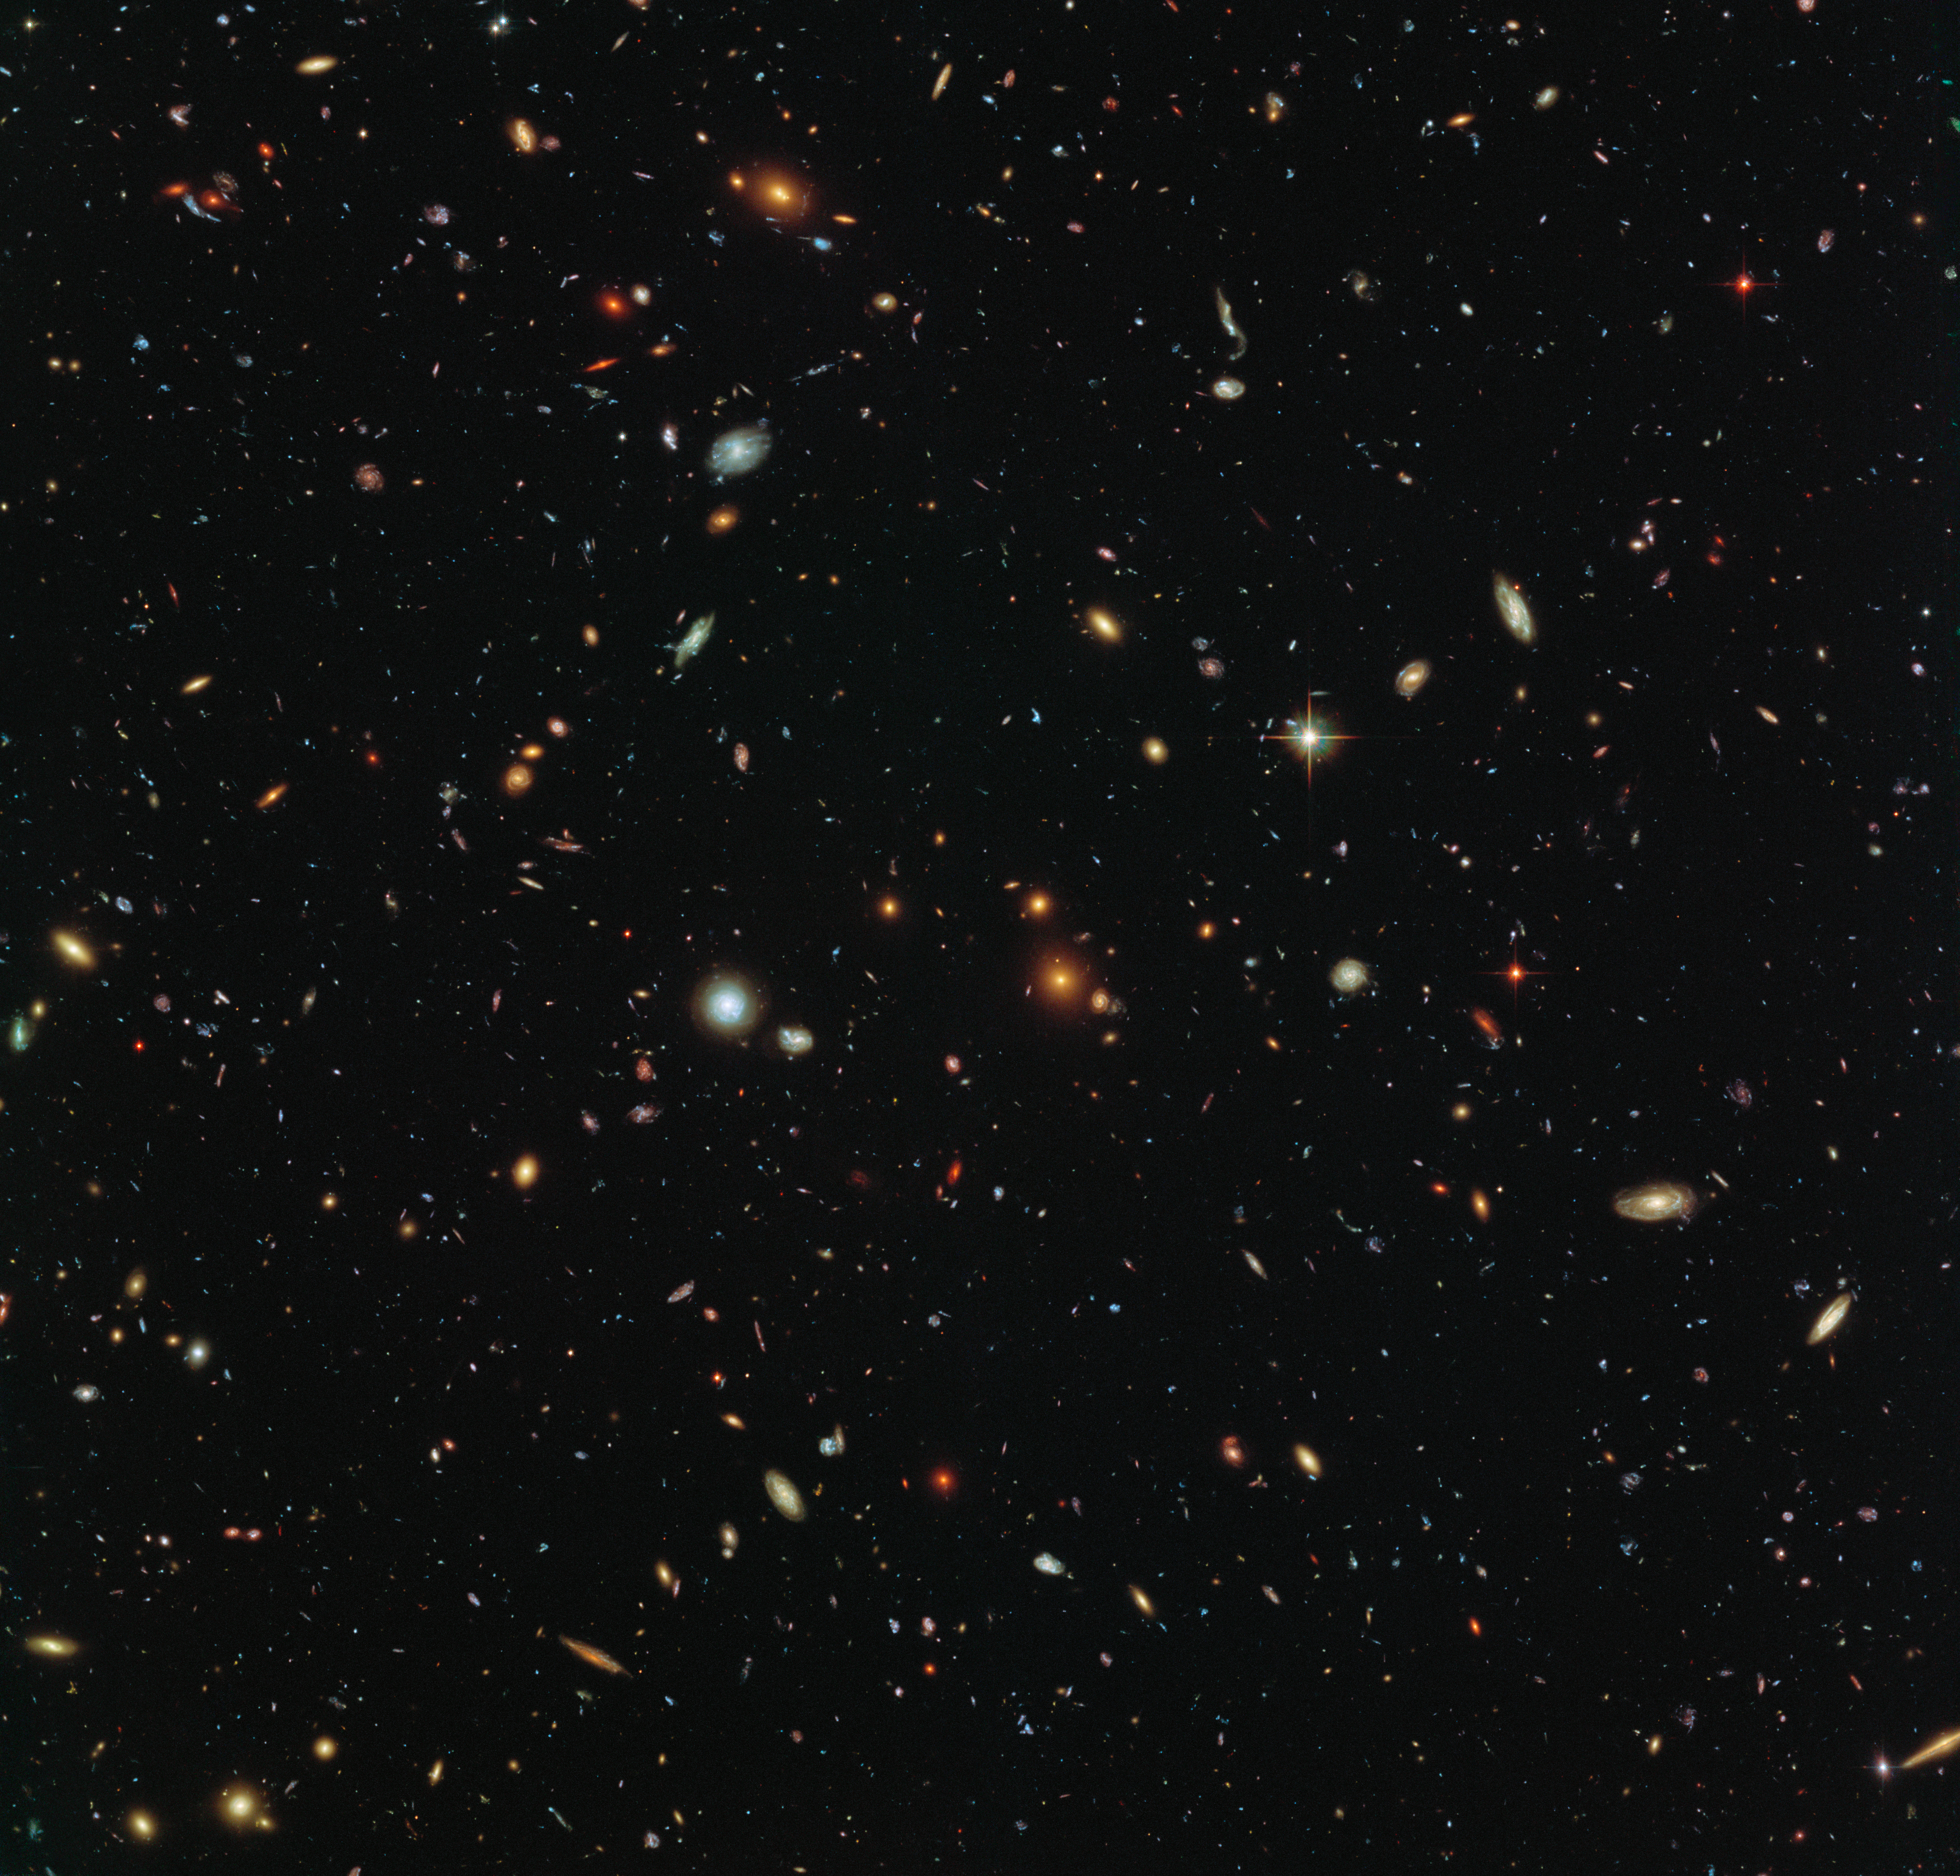

Swimming in Sculptor

Peering deep into the early Universe, this picturesque parallel field observation from the NASA/ESA Hubble Space Telescope reveals thousands of colourful galaxies swimming in the inky blackness of space. A few foreground stars from our own galaxy, the Milky Way, are also visible.

In October 2013 Hubble’s Wide Field Camera 3 (WFC3) and Advanced Camera for Surveys (ACS) began observing this portion of sky as part of the Frontier Fields programme. This spectacular skyscape was captured during the study of the giant galaxy cluster Abell 2744, otherwise known as Pandora’s Box. While one of Hubble’s cameras concentrated on Abell 2744, the other camera viewed this adjacent patch of sky near to the cluster.

Containing countless galaxies of various ages, shapes and sizes, this parallel field observation is nearly as deep as the Hubble Ultra-Deep Field. In addition to showcasing the stunning beauty of the deep Universe in incredible detail, this parallel field — when compared to other deep fields — will help astronomers understand how similar the Universe looks in different directions

Credit: NASA, ESA and the HST Frontier Fields team (STScI) Acknowledgement: Judy Schmidt (Geckzilla)